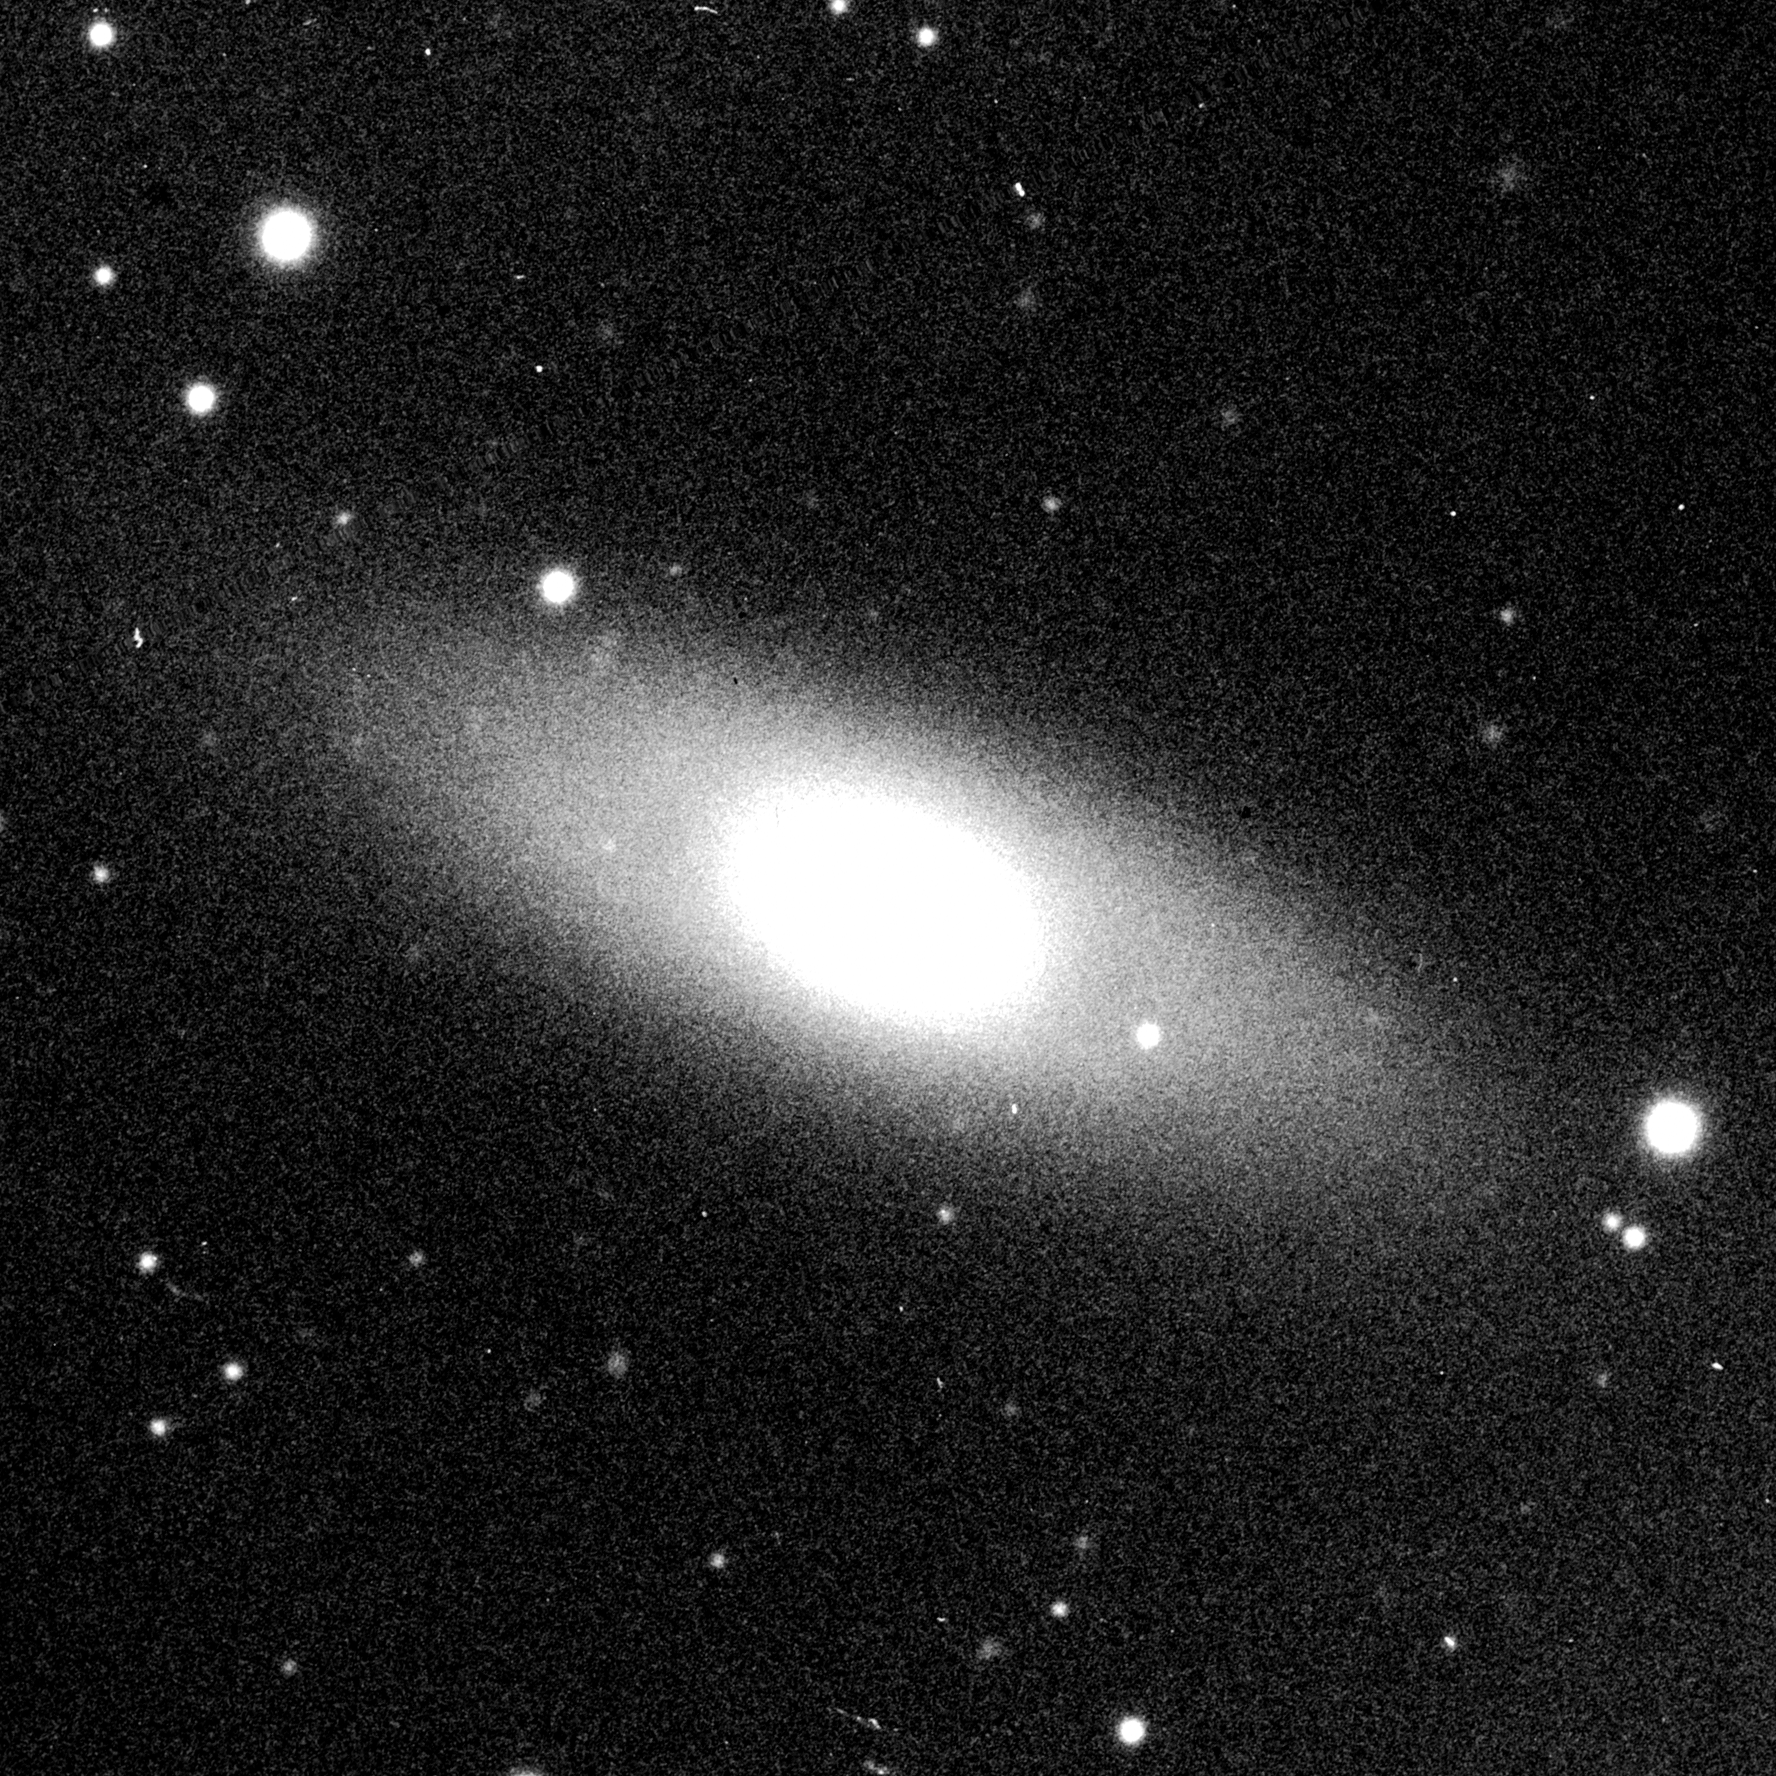

Central bulges of spiral galaxies - NGC 5838 (ground-based image)

This ground based images represents a complete view of the spiral galaxy NGC 5838.

Credit: Allan Sandage (The Observatories of the Carnegie Institution of Washington) and John Bedke (Computer Sciences Corporation and the Space Telescope Science Institute)